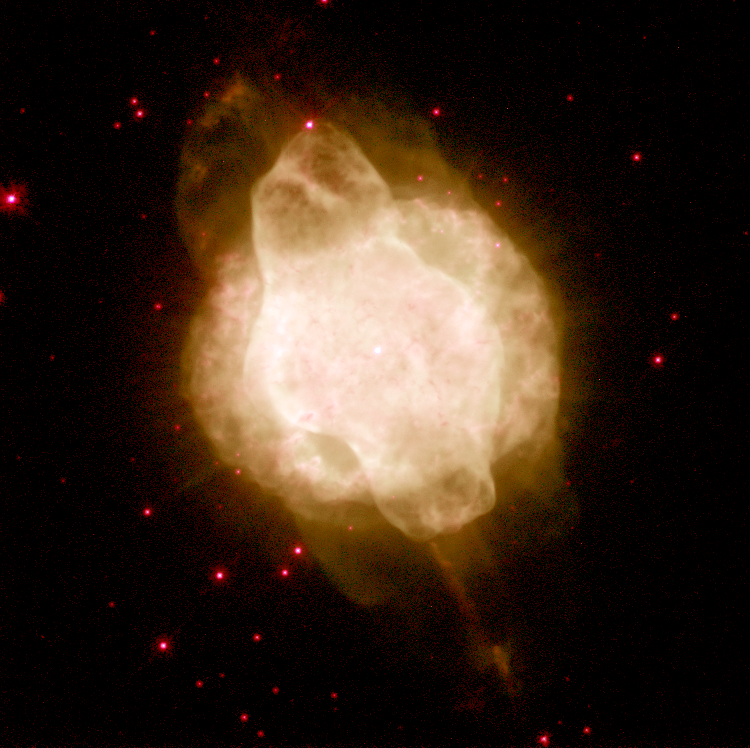

Hubble's Planetary Nebula Gallery. A View of NGC 3918

NGC 3918 is in the constellation Centaurus and is about 3, 000 light-years from us. Its diameter is about 0.3 light-year. It shows a roughly spherical outer envelope but an elongated inner balloon inflated by a fast wind from the hot central star, which is starting to break out of the spherical envelope at the top and bottom of the image.

Credit: Howard Bond ( Space Telescope Science Institute), Robin Ciardullo (Pennsylvania State University) and NASA/ESA